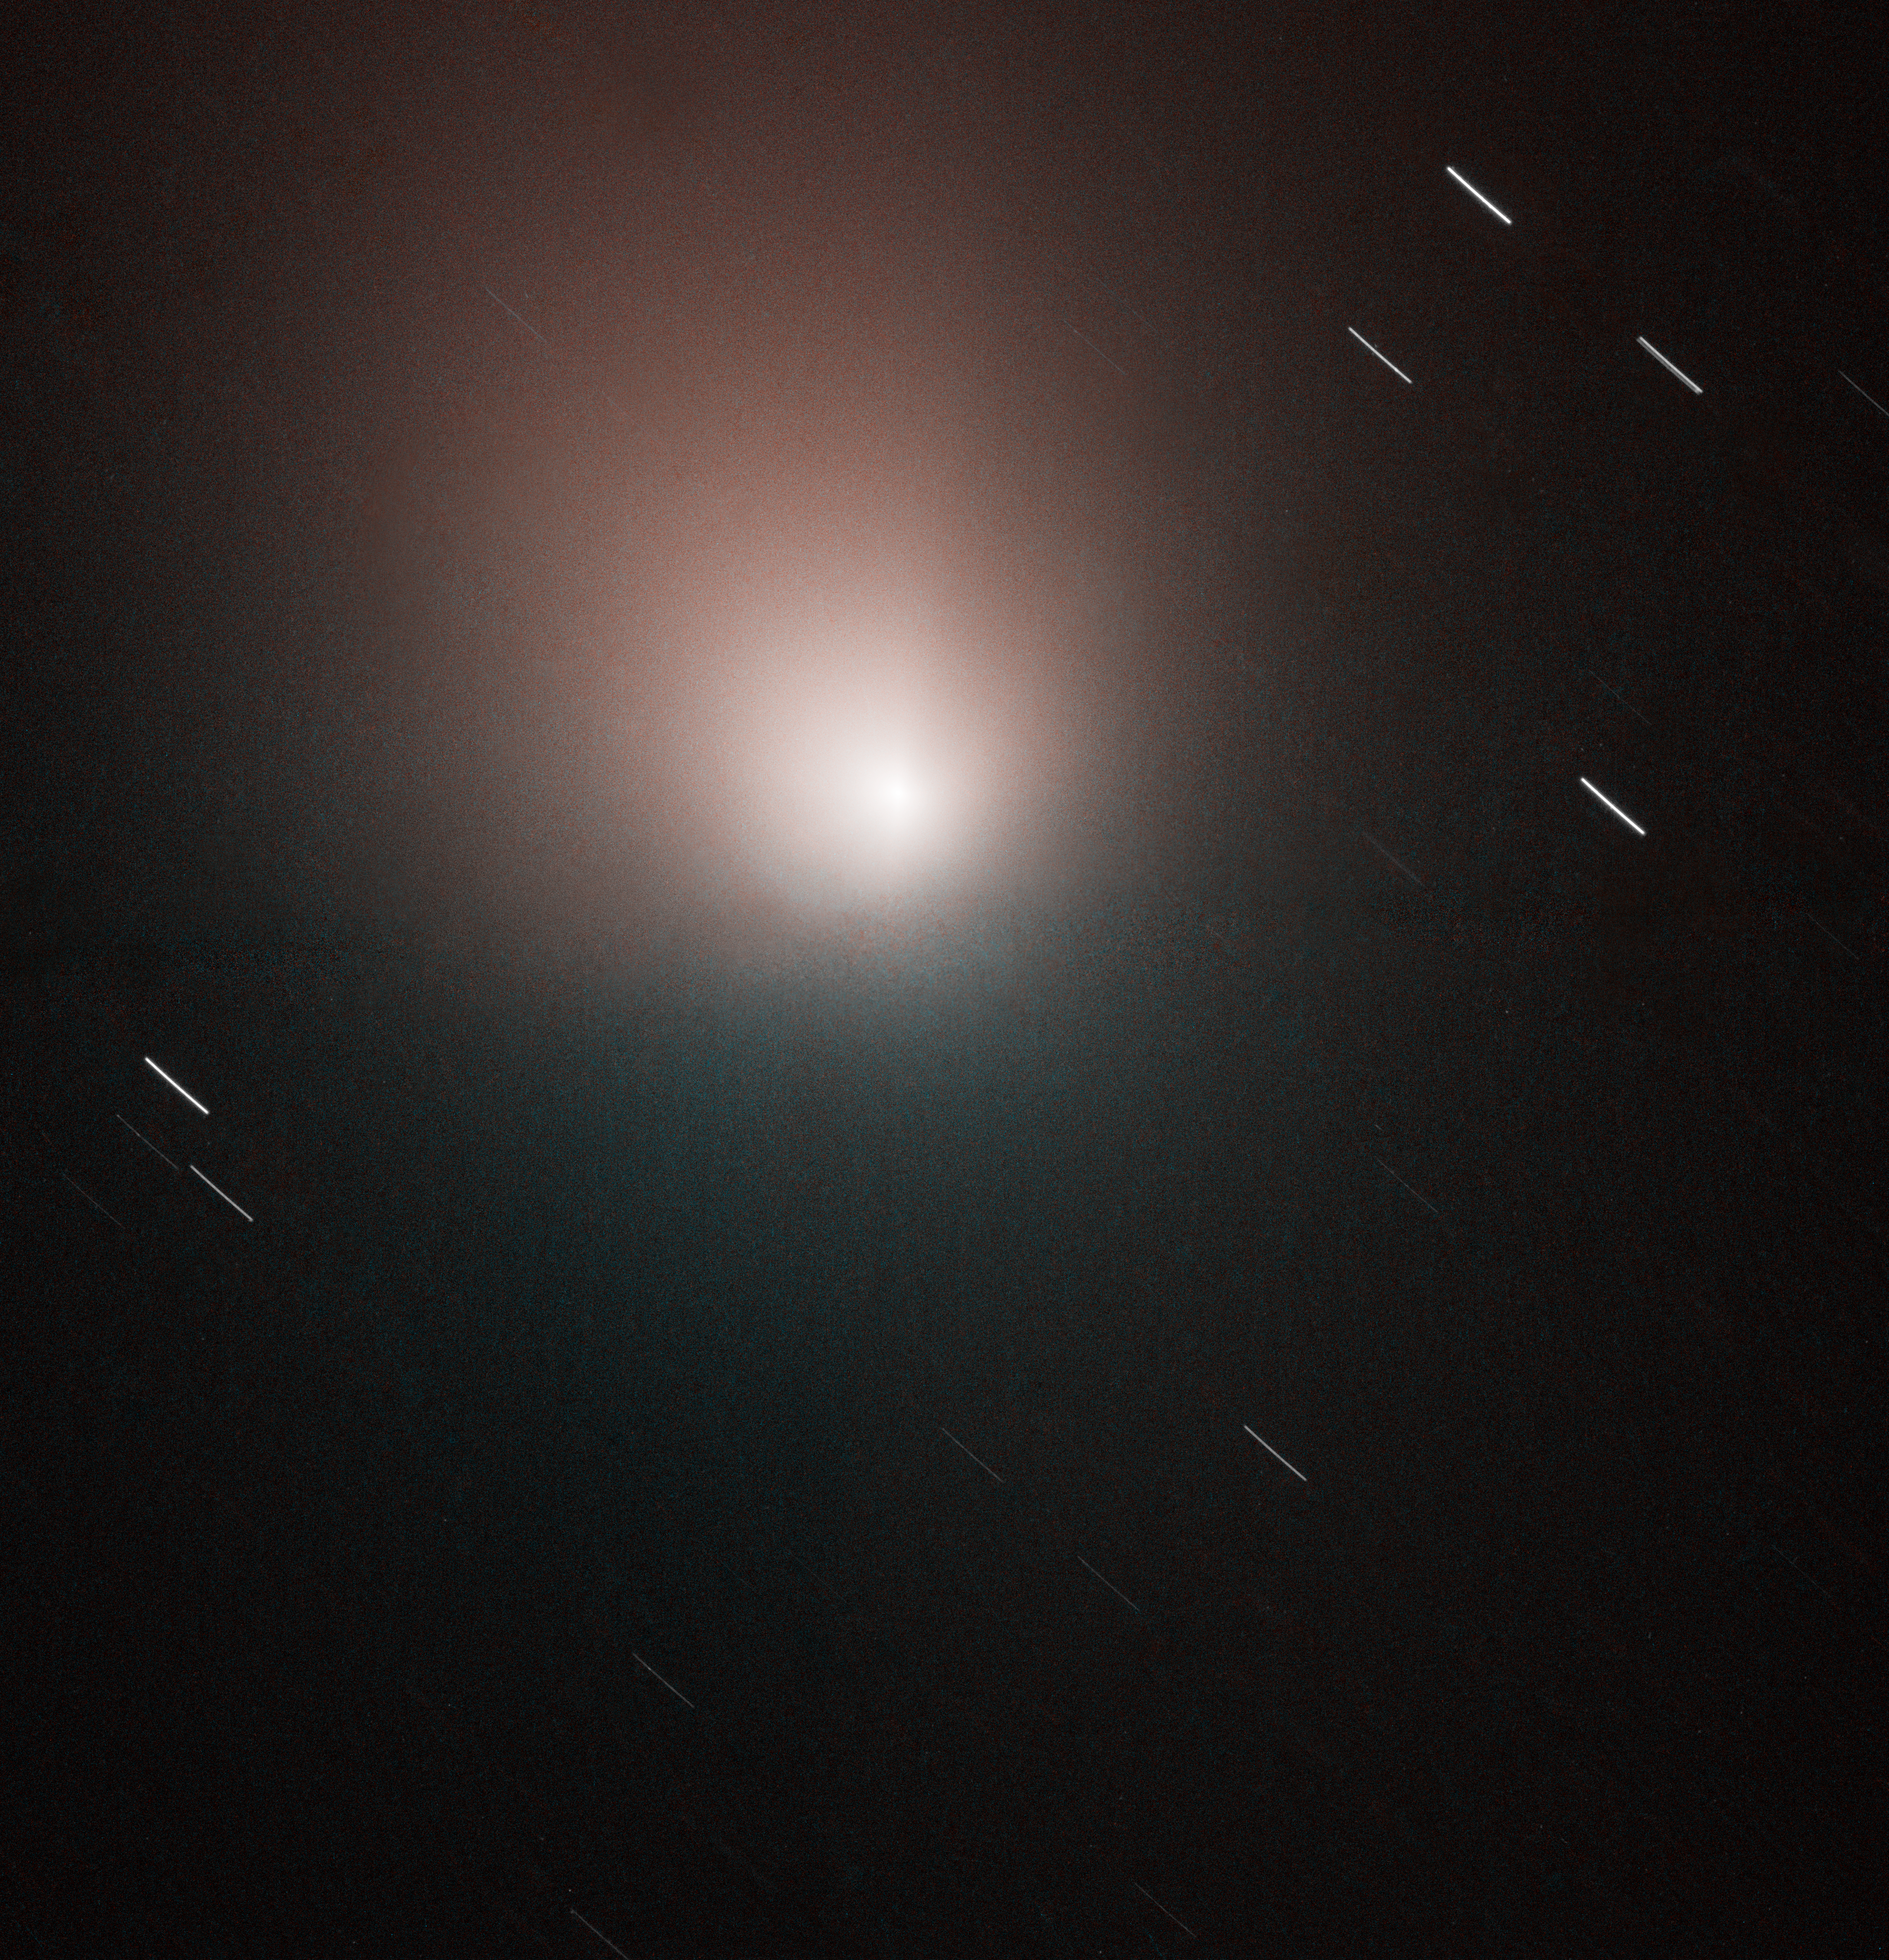

Hubble Images Comet Tempel 1 Just Before Deep Impact Probe Arrives

The NASA/ESA Hubble Space Telescope has snapped an image of Comet 9P/Tempel 1 just days before the Deep Impact spacecraft is scheduled to rendezvous with the comet. This image, taken on the morning of 30 June, 2005, shows an undisturbed and quiet comet. This Advanced Camera for Surveys (ACS) Wide Field Camera (WFC) image of Tempel 1 shows a slightly larger view of the comet than was seen in Hubble images released last week.

This image of the comet shows the dusty inner coma around the nucleus, but the solid nucleus itself is below Hubble's resolution. The nucleus was at a distance of 134 million kilometers when the image was taken.

The ACS/WFC image is a composite of data taken with blue and red filters onboard Hubble. A quiescent comet is seen in this pre-impact image along with elongated star trails. As the telescope was locked on the movement of the comet, the background stars left small trailed arcs during the time the exposures were taken.

Credit: NASA, ESA, and the Hubble Heritage Team (STScI/AURA). Acknowledgment: P. Feldman (JHU), L. McFadden (University of Maryland),